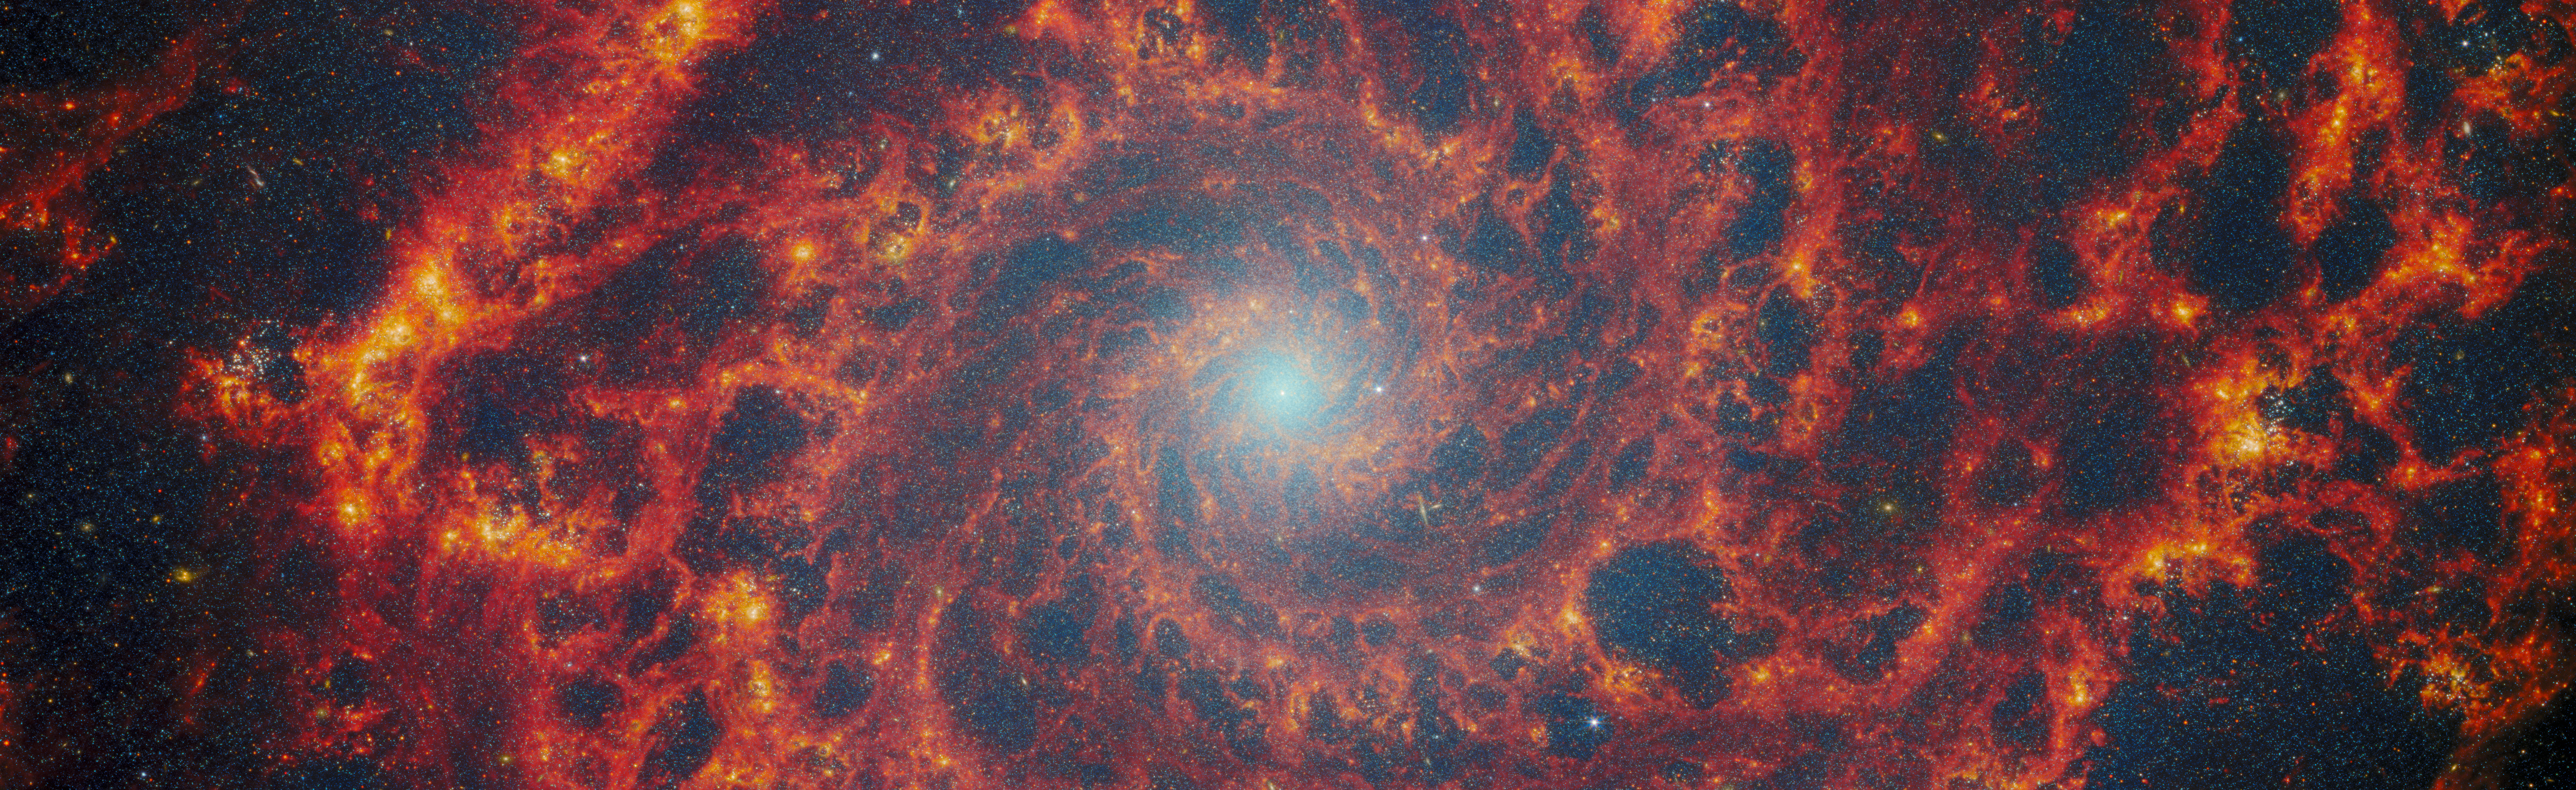

Catching the edge of the Phantom Galaxy

In August 2022, to mark the launch of the Picture of the Month series, ESA/Webb published a stunning image of the Phantom Galaxy (also known as M74 and NGC 628). Now, this series is revisiting the target to feature new data on this iconic spiral galaxy.

M74 resides around 32 million light-years away from Earth in the constellation Pisces, and lies almost face-on to Earth. This, coupled with its well-defined spiral arms, makes it a favourite target for astronomers studying the origin and structure of galactic spirals.

This image features data from two of Webb’s instruments: MIRI (Mid-InfraRed Instrument) and NIRCam (Near-InfraRed Camera). Observations in the infrared reveal the galaxy’s creeping tendrils of gas, dust and stars. In this image the dark red regions trace the filamentary warm dust permeating the galaxy. The red regions show the reprocessed light from complex molecules forming on dust grains, while orange and yellow colours reveal the regions of gas ionised by the recently formed star clusters. Stellar feedback has a dramatic effect on the medium within the galaxy and creates a complex network of bright knots as well as cavernous black bubbles. The lack of gas in the nuclear region of this galaxy also provides an unobscured view of the nuclear star cluster at the galaxy's centre. M74 is a particular class of spiral galaxy known as a ‘grand design spiral’, meaning that its spiral arms are prominent and well-defined, unlike the patchy and ragged structure seen in some spiral galaxies.

M74 was observed by Webb as part of a series of observations collectively entitled Feedback in Emerging extrAgalactic Star clusTers, or FEAST (PI: A. Adamo). Many other targets of the FEAST programme, including NGC 4449, M51, and M83, were the subjects of previous ESA/Webb Picture of the Month images in 2023 and 2024. The FEAST observations were designed to shed light on the interplay between stellar feedback and star formation in environments outside the Milky Way galaxy. Stellar feedback is the term used to describe the outpouring of energy from stars into the environments which form them, and is a process that contributes significantly to determining the rates at which stars form. Understanding stellar feedback is vital for building accurate universal models of star formation.

The new Webb data obtained by the FEAST team has allowed scientists to look at the stellar nurseries in galaxies that are many light years away. Astronomers are learning how other galaxies are forming stars and how stars actively participate to model the galaxy interstellar medium. They have found that newly born stars slowly carve they gas and dust nurseries modifying the morphological appearance and essentially destructing them, as Webb has shown that this evolution is connected with star clusters. Furthermore, the team has concluded from their studies that the spiral arms captured by the extended coverage of the FEAST programme are the places where stars are forming more actively in the galaxy. The brighter and larger complexes of stellar nurseries are in the spiral arms fully captured by the new Webb data. The telescope is now revealing the map of hydrogen emission lines in the near-infrared. These lines are less affected than the dusts and reveals the places where new massive stars have just formed.

Credit: ESA/Webb, NASA & CSA, A. Adamo (Stockholm University) and the FEAST JWST team